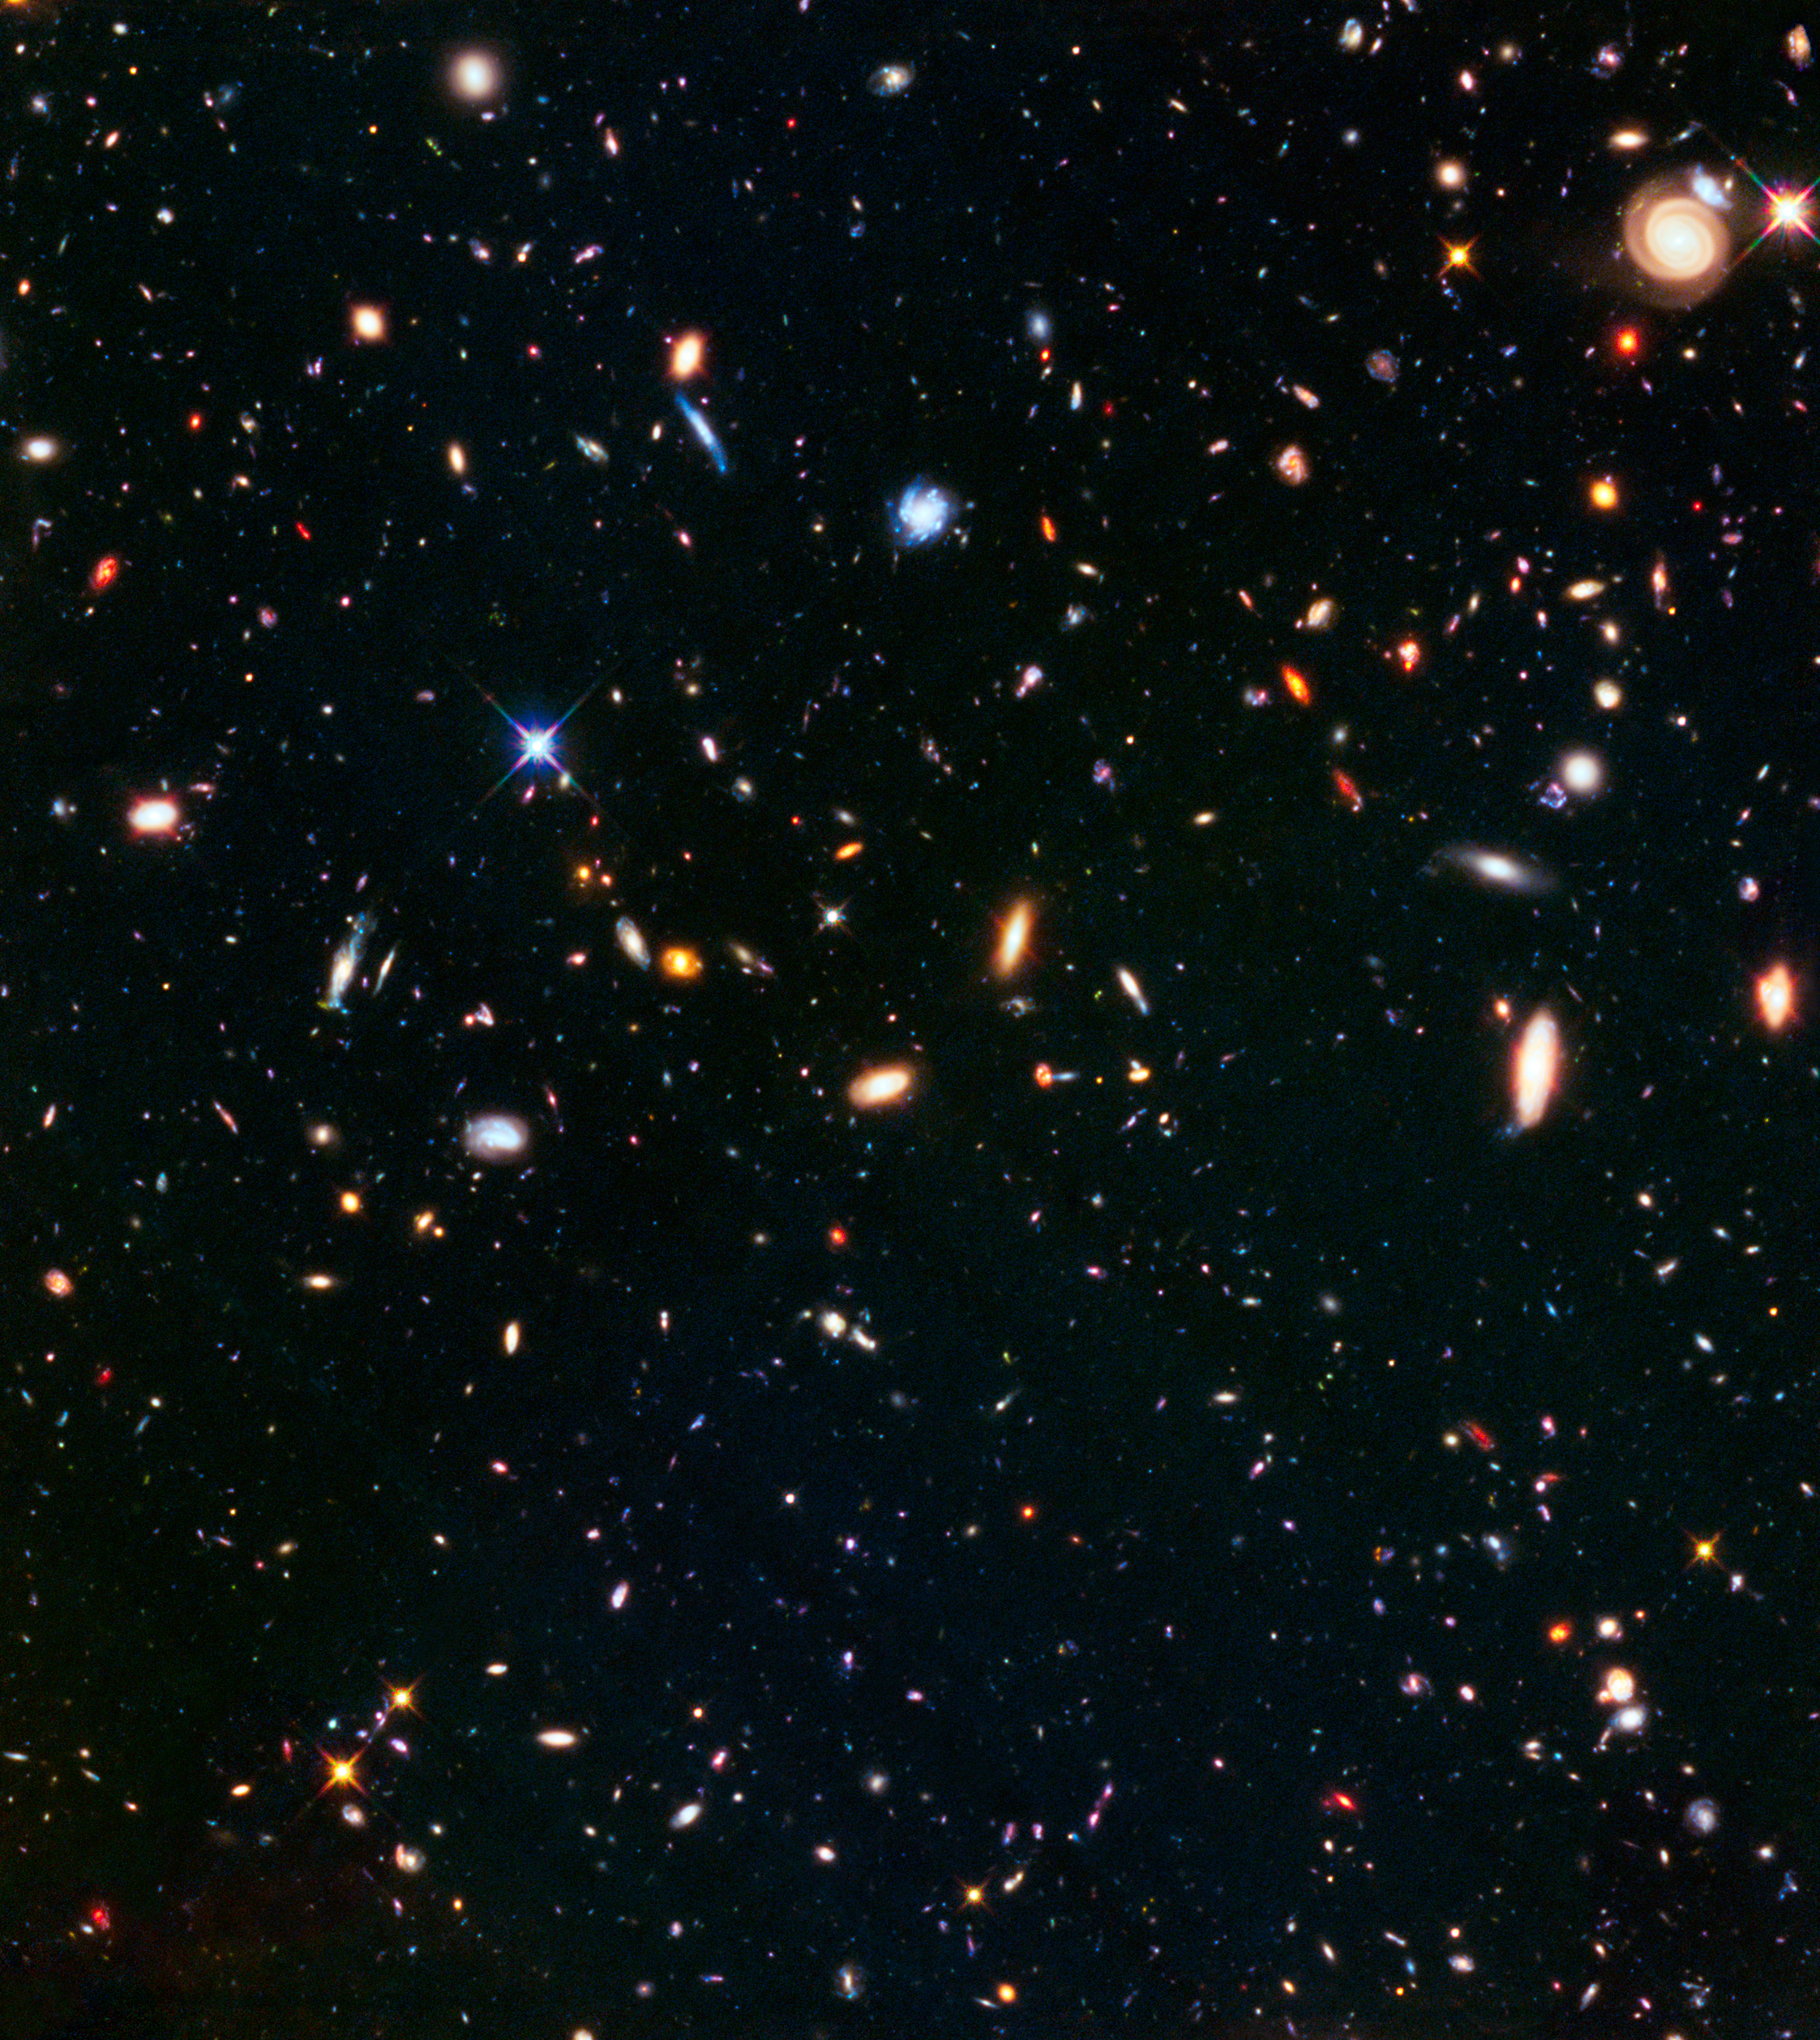

Parallel field of Abell S1063

This part of the sky was observed in parallel with the galaxy cluster Abell S1063 and is also part of the Frontier Fields programme. While one of Hubble’s cameras observed the galaxy cluster itself, another simultaneously captured the spectacular scene pictured above, of an “unremarkable” patch of space. While not having the advantage of strong gravitational lensing this parallel field observation is still nearly as deep as the Hubble Ultra-Deep Field. Combined with other deep fields it helps astronomers understand how similar the Universe looks in different directions.

Credit: NASA, ESA, and J. Lotz (STScI)